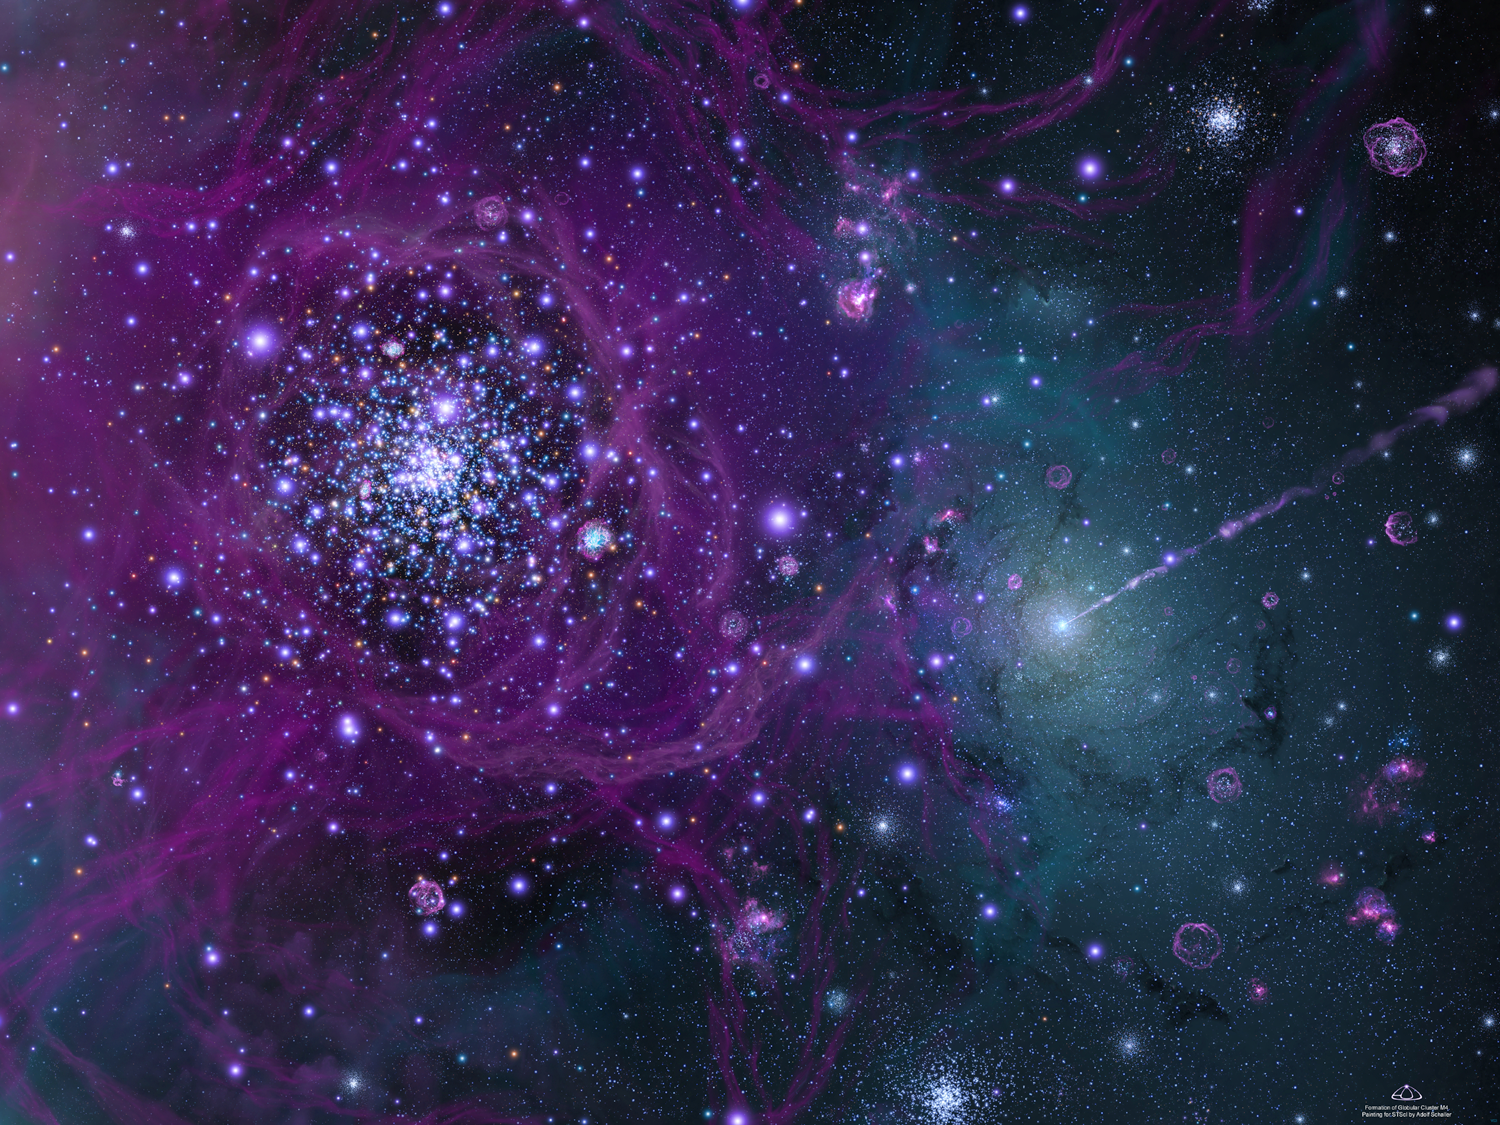

Birth of Our Galaxy

This is an artist's concept of the early formative years of our Milky Way galaxy, circa 12.7 billion years ago. That long ago, the majestic spiral arms of our galaxy had not yet formed; the sky was a sea of globular star clusters.

The bright blue star cluster at center left is among hundreds of primeval globular star clusters that came together to build up the galaxy. This particular cluster survives today as the globular cluster M4 in Scorpius. Astronomers used Hubble to find the oldest burned-out stars - called white dwarfs - in the cluster. The dwarfs serve as 'clocks' for calculating the cluster's age based on temperature. The cluster - chock full young and blue-white stars in this artwork - probably started forming several hundred million years after the big bang.

At right of center, the hub of the galaxy is beginning to form. Lanes of dark dust encircle a young supermassive black hole. An extragalactic jet of high-speed material beams into space from the young black hole, which is engorging itself on stars, gas and dust. A string of supernova explosions from the most massive stars in the cluster creates pink bubbles of hot gas around each star cluster.

Credit: NASA/ESA and Adolf Schaller